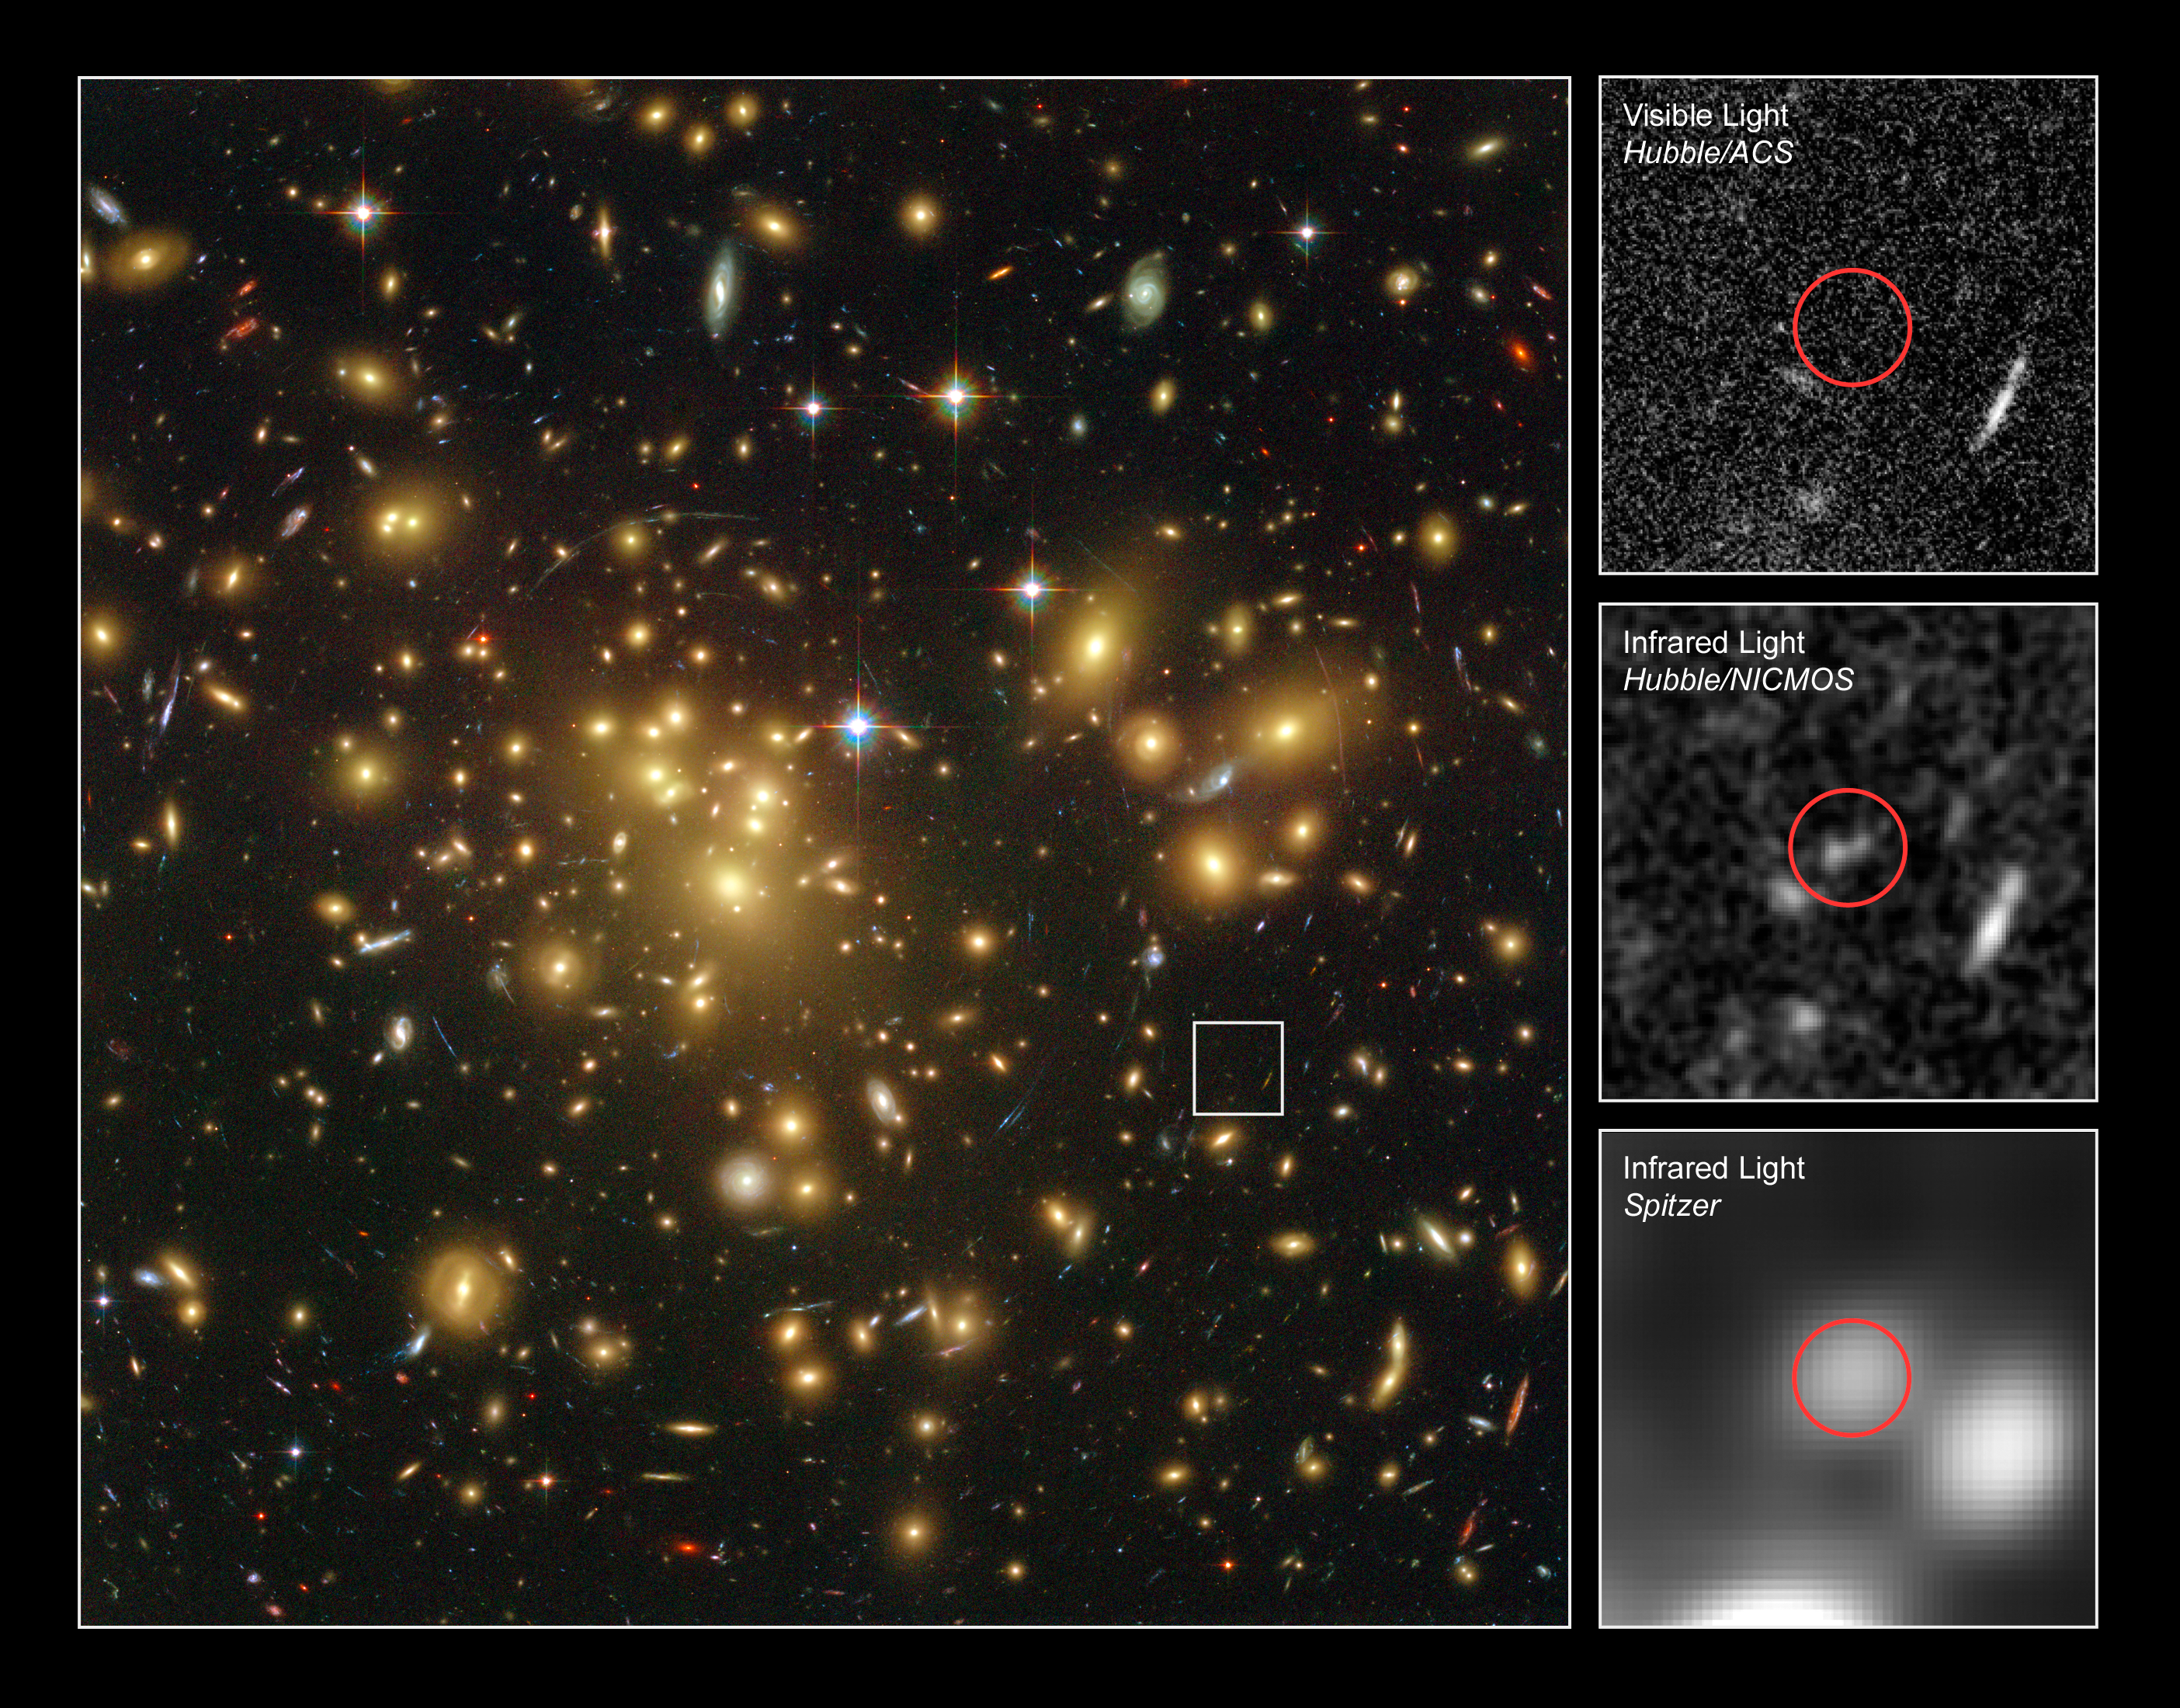

Hubble Uncovers One of the Youngest and Brightest Galaxies in the Early Universe

A massive cluster of yellowish galaxies is seemingly caught in a spider's web of eerily distorted background galaxies in the left-hand image, taken with the Advanced Camera for Surveys (ACS) aboard NASA/ESA Hubble Space Telescope.

The gravity of the cluster's trillion stars acts as a cosmic "zoom lens", bending and magnifying the light of the galaxies located far behind it, a technique called gravitational lensing. The faraway galaxies appear in the Hubble image as arc-shaped objects around the cluster, named Abell 1689. The increased magnification allows astronomers to study remote galaxies in greater detail.

One galaxy is so far away, however, it does not show up in the visible-light image taken with ACS (top, right), because its light is stretched to invisible infrared wavelengths by the Universe's expansion.

Astronomers used Hubble's Near Infrared Camera and Multi-Object Spectrometer (NICMOS) and NASA's Spitzer Space Telescope with its Infrared Array Camera (IRAC) - with help from the gravitational lensing cluster - to see the faraway galaxy.

The distant galaxy, dubbed A1689-zD1, appears as a greyish-white smudge in the close-up view taken with Hubble's NICMOS (centre, right), and as a whitish blob in the Spitzer IRAC close-up view (bottom, right). The galaxy is brimming with star birth. Hubble and Spitzer worked together to show that it is one of the youngest galaxies ever discovered. Astronomers estimate that the galaxy is 13 billion light-years away. Abell 1689 is 2.2 billion light-years away.

A1689-zD1 was born during the middle of the "dark ages", a period in the early universe when the first stars and galaxies were just beginning to burst to life. The dark ages lasted from about 400,000 to roughly a billion years after the Big Bang. Astronomers think that A1689-zD1 was one of the galaxies that helped end the dark ages.

The ACS images were taken in 2002, the NICMOS images in 2005 and 2007, and the Spitzer IRAC images in 2006.

Credit: NASA; ESA; L. Bradley (Johns Hopkins University); R. Bouwens (University of California, Santa Cruz); H. Ford (Johns Hopkins University); and G. Illingworth (University of California, Santa Cruz)